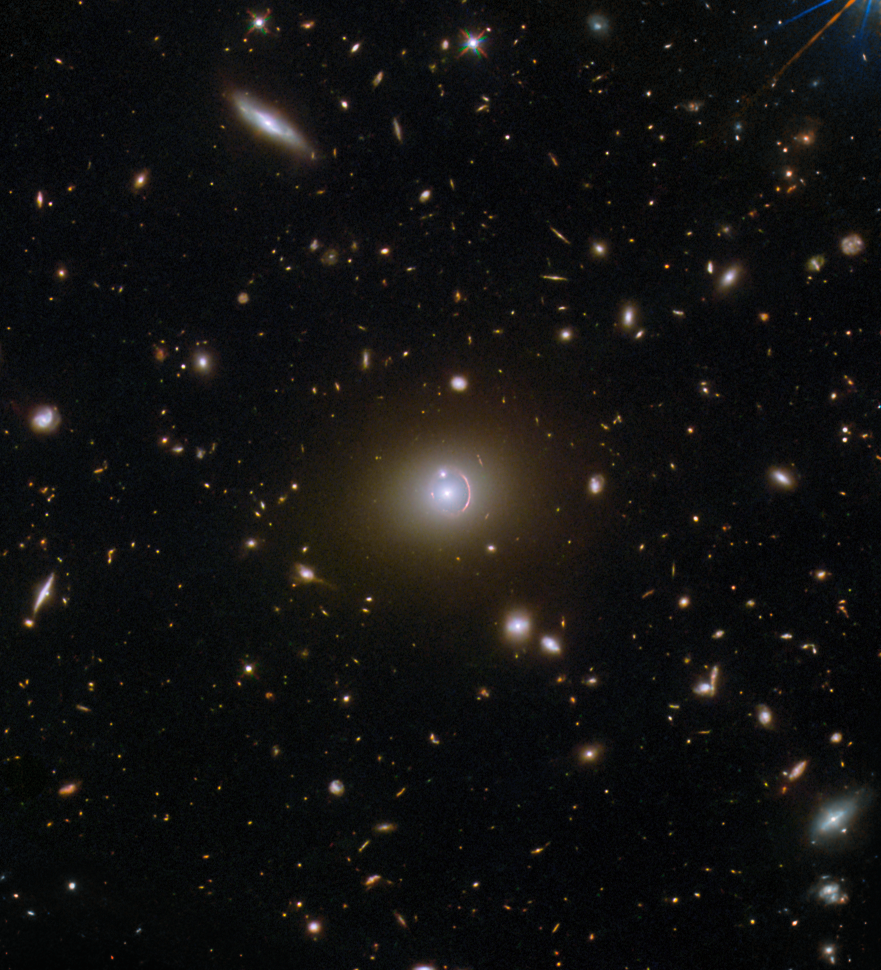

So near, or so far?

What are we looking at when we study this image? A very distant galaxy that lies 19.5 billion light-years from Earth? Or a much closer luminous red galaxy that is a (relatively) small 2.7 billion light-years away? Or a third galaxy that appears to be fairly close to the second? The answer, perhaps confusingly, is that we are looking at all three. More precisely, we are looking at light emitted from all of those galaxies, even though the most distant galaxy lies directly behind the first as seen from Earth. In fact, it is that very alignment that makes the particular visuals in this image possible.

The central bright dot in this image is one of the closer galaxies, known by the lengthy — but informative — name of SDSS J020941.27+001558.4 (galaxy names in this format provide precise information about their location in the sky). The other bright dot above it — that appears to be intersecting a curving crescent of light — is SDSS J020941.23+001600.7, the second closer galaxy. And finally, that curving crescent of light itself is the ‘lensed’ light from the very distant galaxy. This is known as HerS J020941.1+001557, and it is also an interesting example of a phenomenon known as an Einstein ring.

Einstein rings occur when light from a very distant object is bent (or ‘lensed’) about a massive intermediate (or ‘lensing)’ object. This is possible because spacetime, the fabric of the Universe itself, is bent by mass, and therefore light travelling through spacetime is as well. This is much too subtle to be observed on a local level, but sometimes becomes clearly observable when dealing with curvatures of light on enormous, astronomical scales, for example, when the light emitted from a galaxy is bent around another galaxy or galaxy cluster. When the lensed object and the lensing object line up just so, the result is the distinctive Einstein ring shape, which appears as a full or partial circle of light around the lensing object, depending on how precise the alignment is. This partial Einstein ring is of particular interest as it was identified thanks to a citizen science project — SPACE WARPS — meaning that members of the public enabled the discovery of this object!

Credit: ESA/Hubble & NASA, H. Nayyeri, L. Marchetti, J. Lowenthal